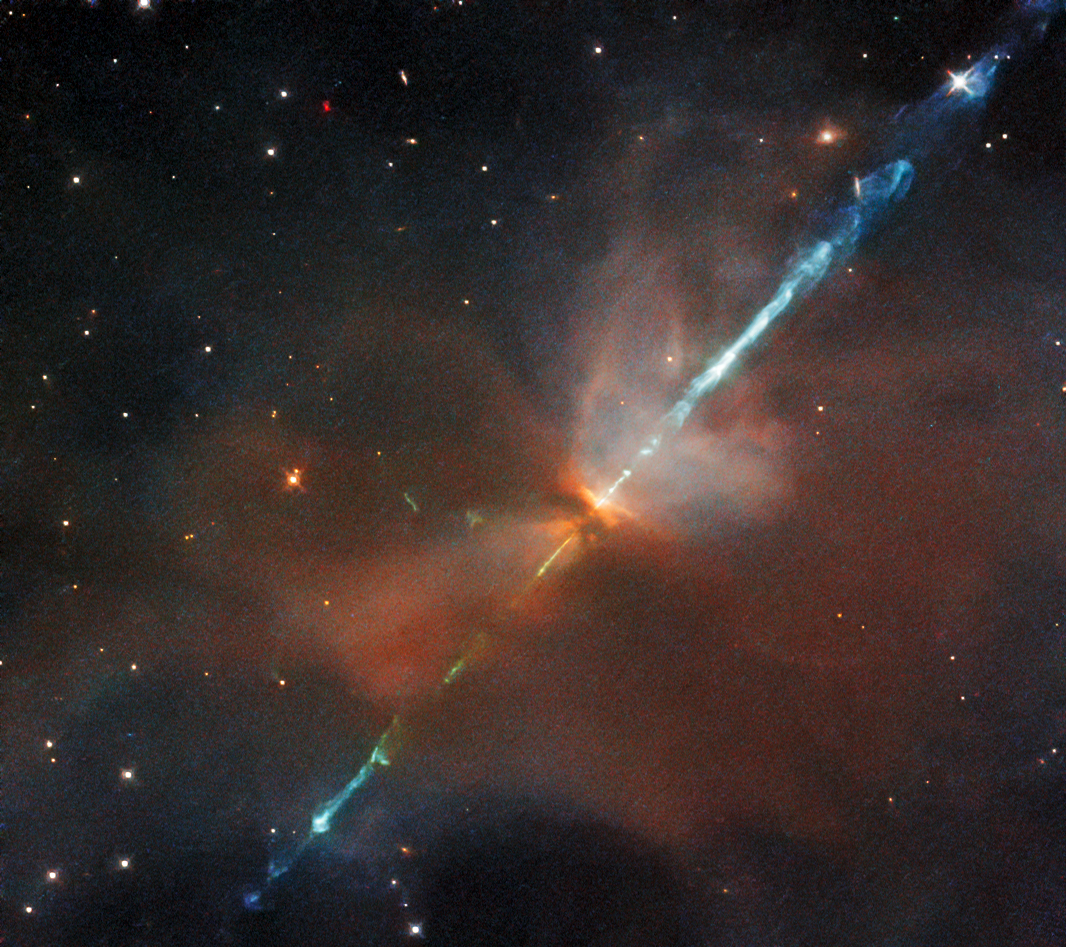

Astronomy in Action

This striking image features a relatively rare celestial phenomenon known as a Herbig–Haro object. This particular Herbig–Haro object is named HH111, and was imaged by Hubble’s Wide Field Camera 3 (WFC3). These spectacular objects are formed under very specific circumstances. Newly formed stars are often very active, and in some cases they expel very narrow jets of rapidly moving ionised gas — gas that is so hot that its molecules and atoms have lost their electrons, making the gas highly charged. The streams of ionised gas then collide with the clouds of gas and dust surrounding newly-formed stars at speeds of hundreds of kilometres per second. It is these energetic collisions that create Herbig–Haro objects such as HH111.

WFC3 takes images at optical and infrared wavelengths, which means that it observes objects at a wavelength range similar to the range that human eyes are sensitive to (optical) and a range of wavelengths that are slightly too long to be detected by human eyes (infrared). Herbig–Haro objects actually release a lot of light at optical wavelengths, but they are difficult to observe because their surrounding dust and gas absorb much of the visible light. Therefore, the WFC3’s ability to observe at infrared wavelengths — where observations are not as affected by gas and dust— is crucial to observing Herbo–Haro objects successfully.

Credit: ESA/Hubble & NASA, B. Nisini